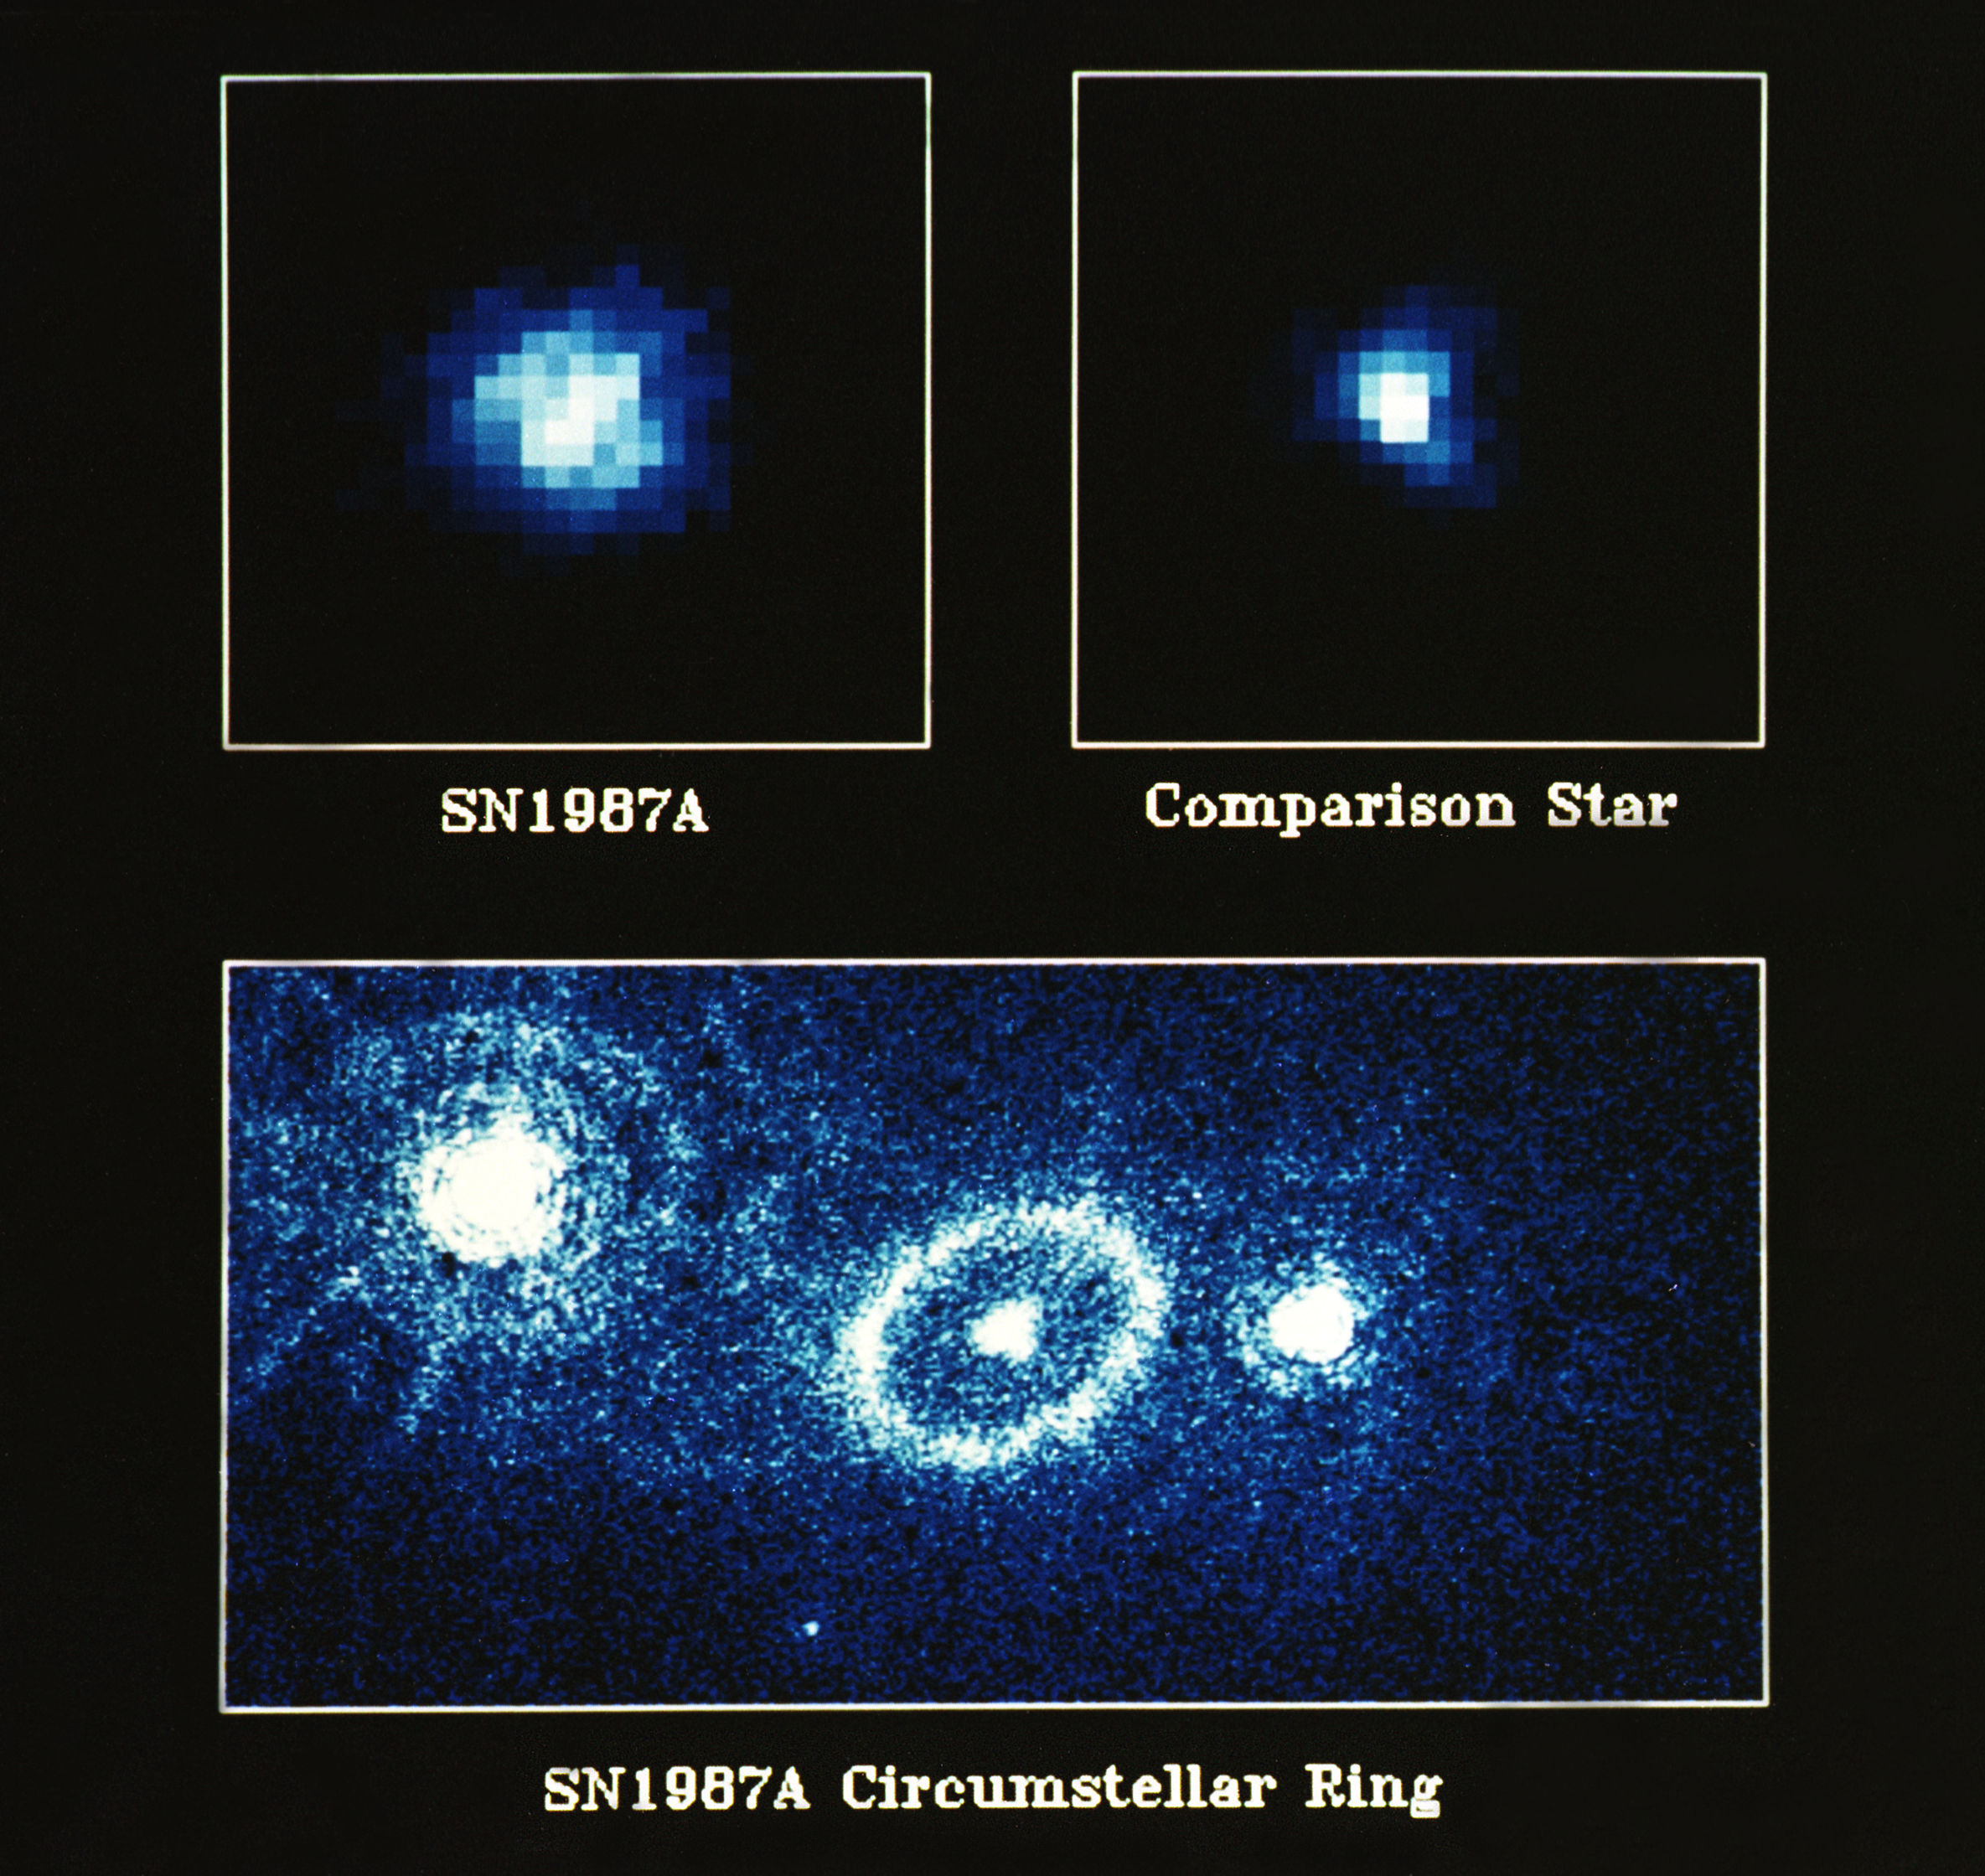

Supernova 1987A

The European Space Agency's Faint Object Camera on board NASA/ESA Hubble Space Telescope has provided a fascinating close-up view of Supernova 1987A in the Large Magellanic Cloud.

Since they first saw the initial explosion in February 1987, astronomers world-wide have been monitoring closely the evolution of SN 1987A using both ground-based and space instrumentation. During the three and a half years following its discovery, the supernova initially increased its brightness by a factor of 100 and has since dimmed one million times in brightness from its peak intensity. This dimming has enabled astronomers to take a closer look at the supernova proper and its surroundings.

Credit: NASA/ESA